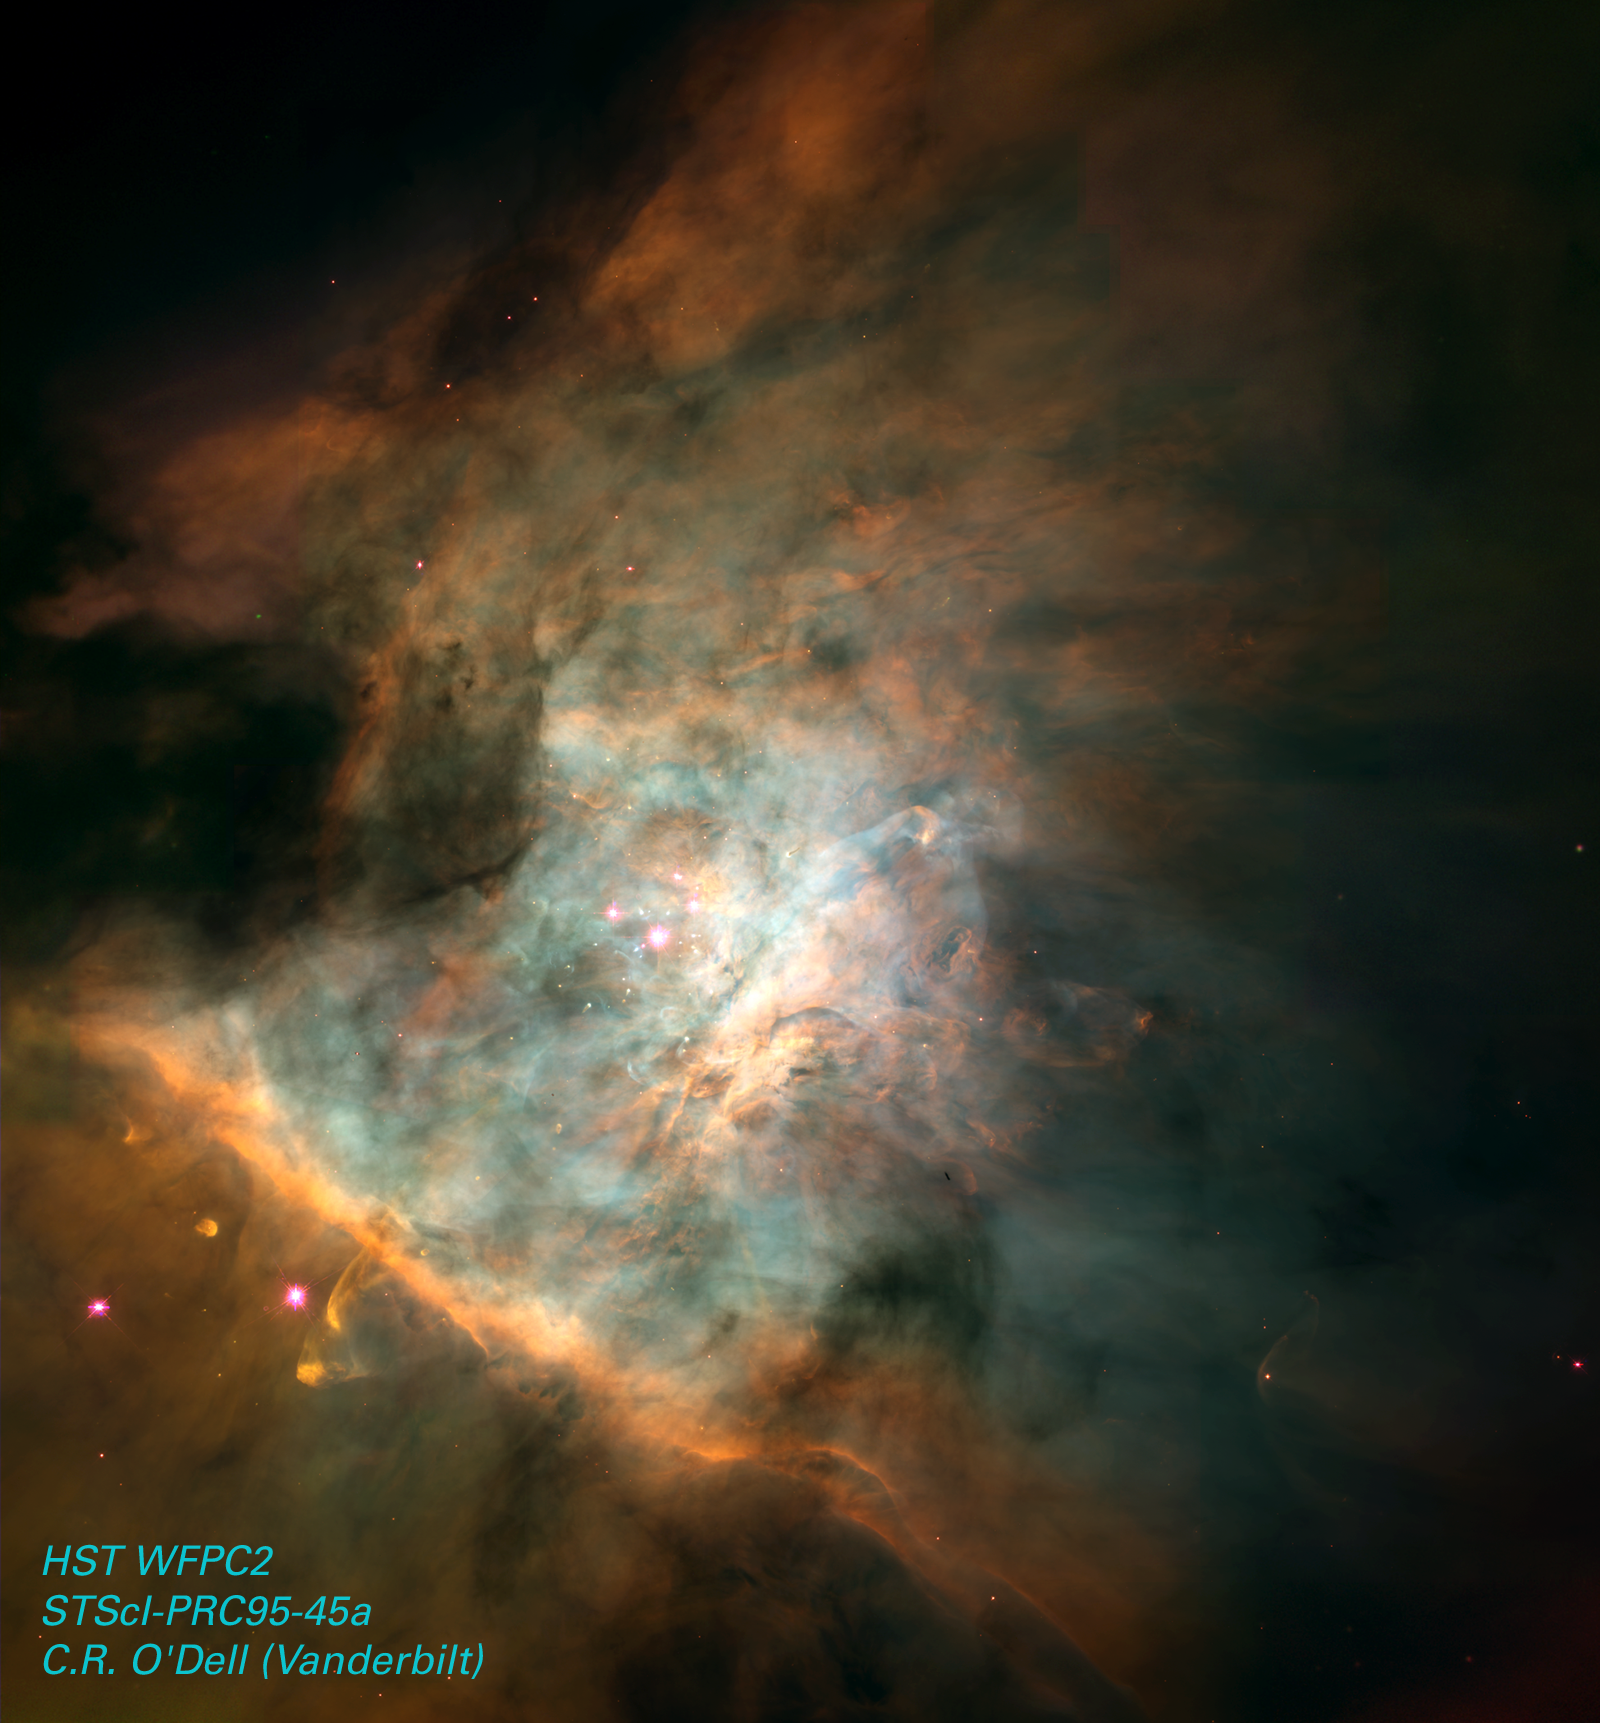

Orion Nebula, NGC 1976, M42

The Hubble Space Telescope continues to reveal various stunning and intricate treasures that reside within the nearby, intense star-forming region known as the Great Nebula in Orion.

Credit: NASA/ESA and C.R. O'Dell (Vanderbilt University)